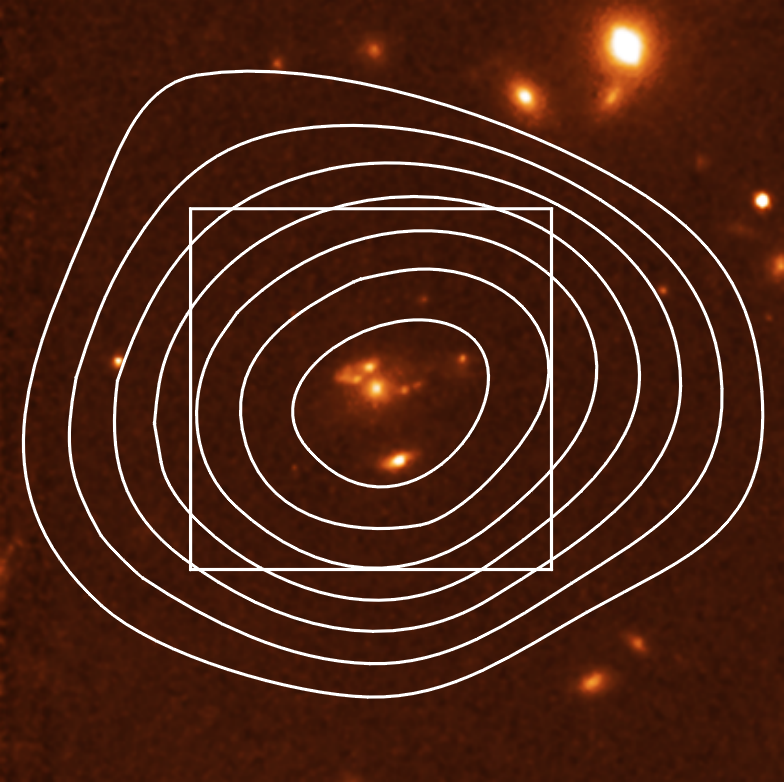

Remote starburst galaxy J1/J2 (1)

This NASA/ESA Hubble Space Telescope image was taken with the Wide Field and Planetary Camera 2 (WFPC2) in red light. The image shows a detailed view of the galaxy SMM J14011+0252, also called J1/J2, which was first observed with the SCUBA (Sub-millimetre Common User Bolometer Array) instrument on the James Clerk Maxwell Telescope in Hawaii. SCUBA intensity contours are shown on the image in the middle. This galaxy belongs to an enigmatic 'hidden' population of galaxies in the early Universe. A group of European and American astronomers led by Jean-Paul Kneib has used Hubble and the gravitational amplification of the galaxy cluster to make the first observation of one of these distant massively star-forming 'dusty' galaxies revealed in the process of formation. The two components of the galaxy, J1 (centered) and J2 (below), are only separated by 50, 000 light years, but have quite different structure. J1 is redder and shows complex structure - very different than optically selected galaxies seen at the same epoch. J2 is bluer and is very compact. Most of the dust emission detected with SCUBA is likely to come from J1. The finest details in J1 are less than 1, 000 light years large - when corrected for the distortions due to the gravitational lens.

For further information, please click the news release link.

Credit: ESA & Jean-Paul Kneib (Observatoire Midi-Pyrénées)